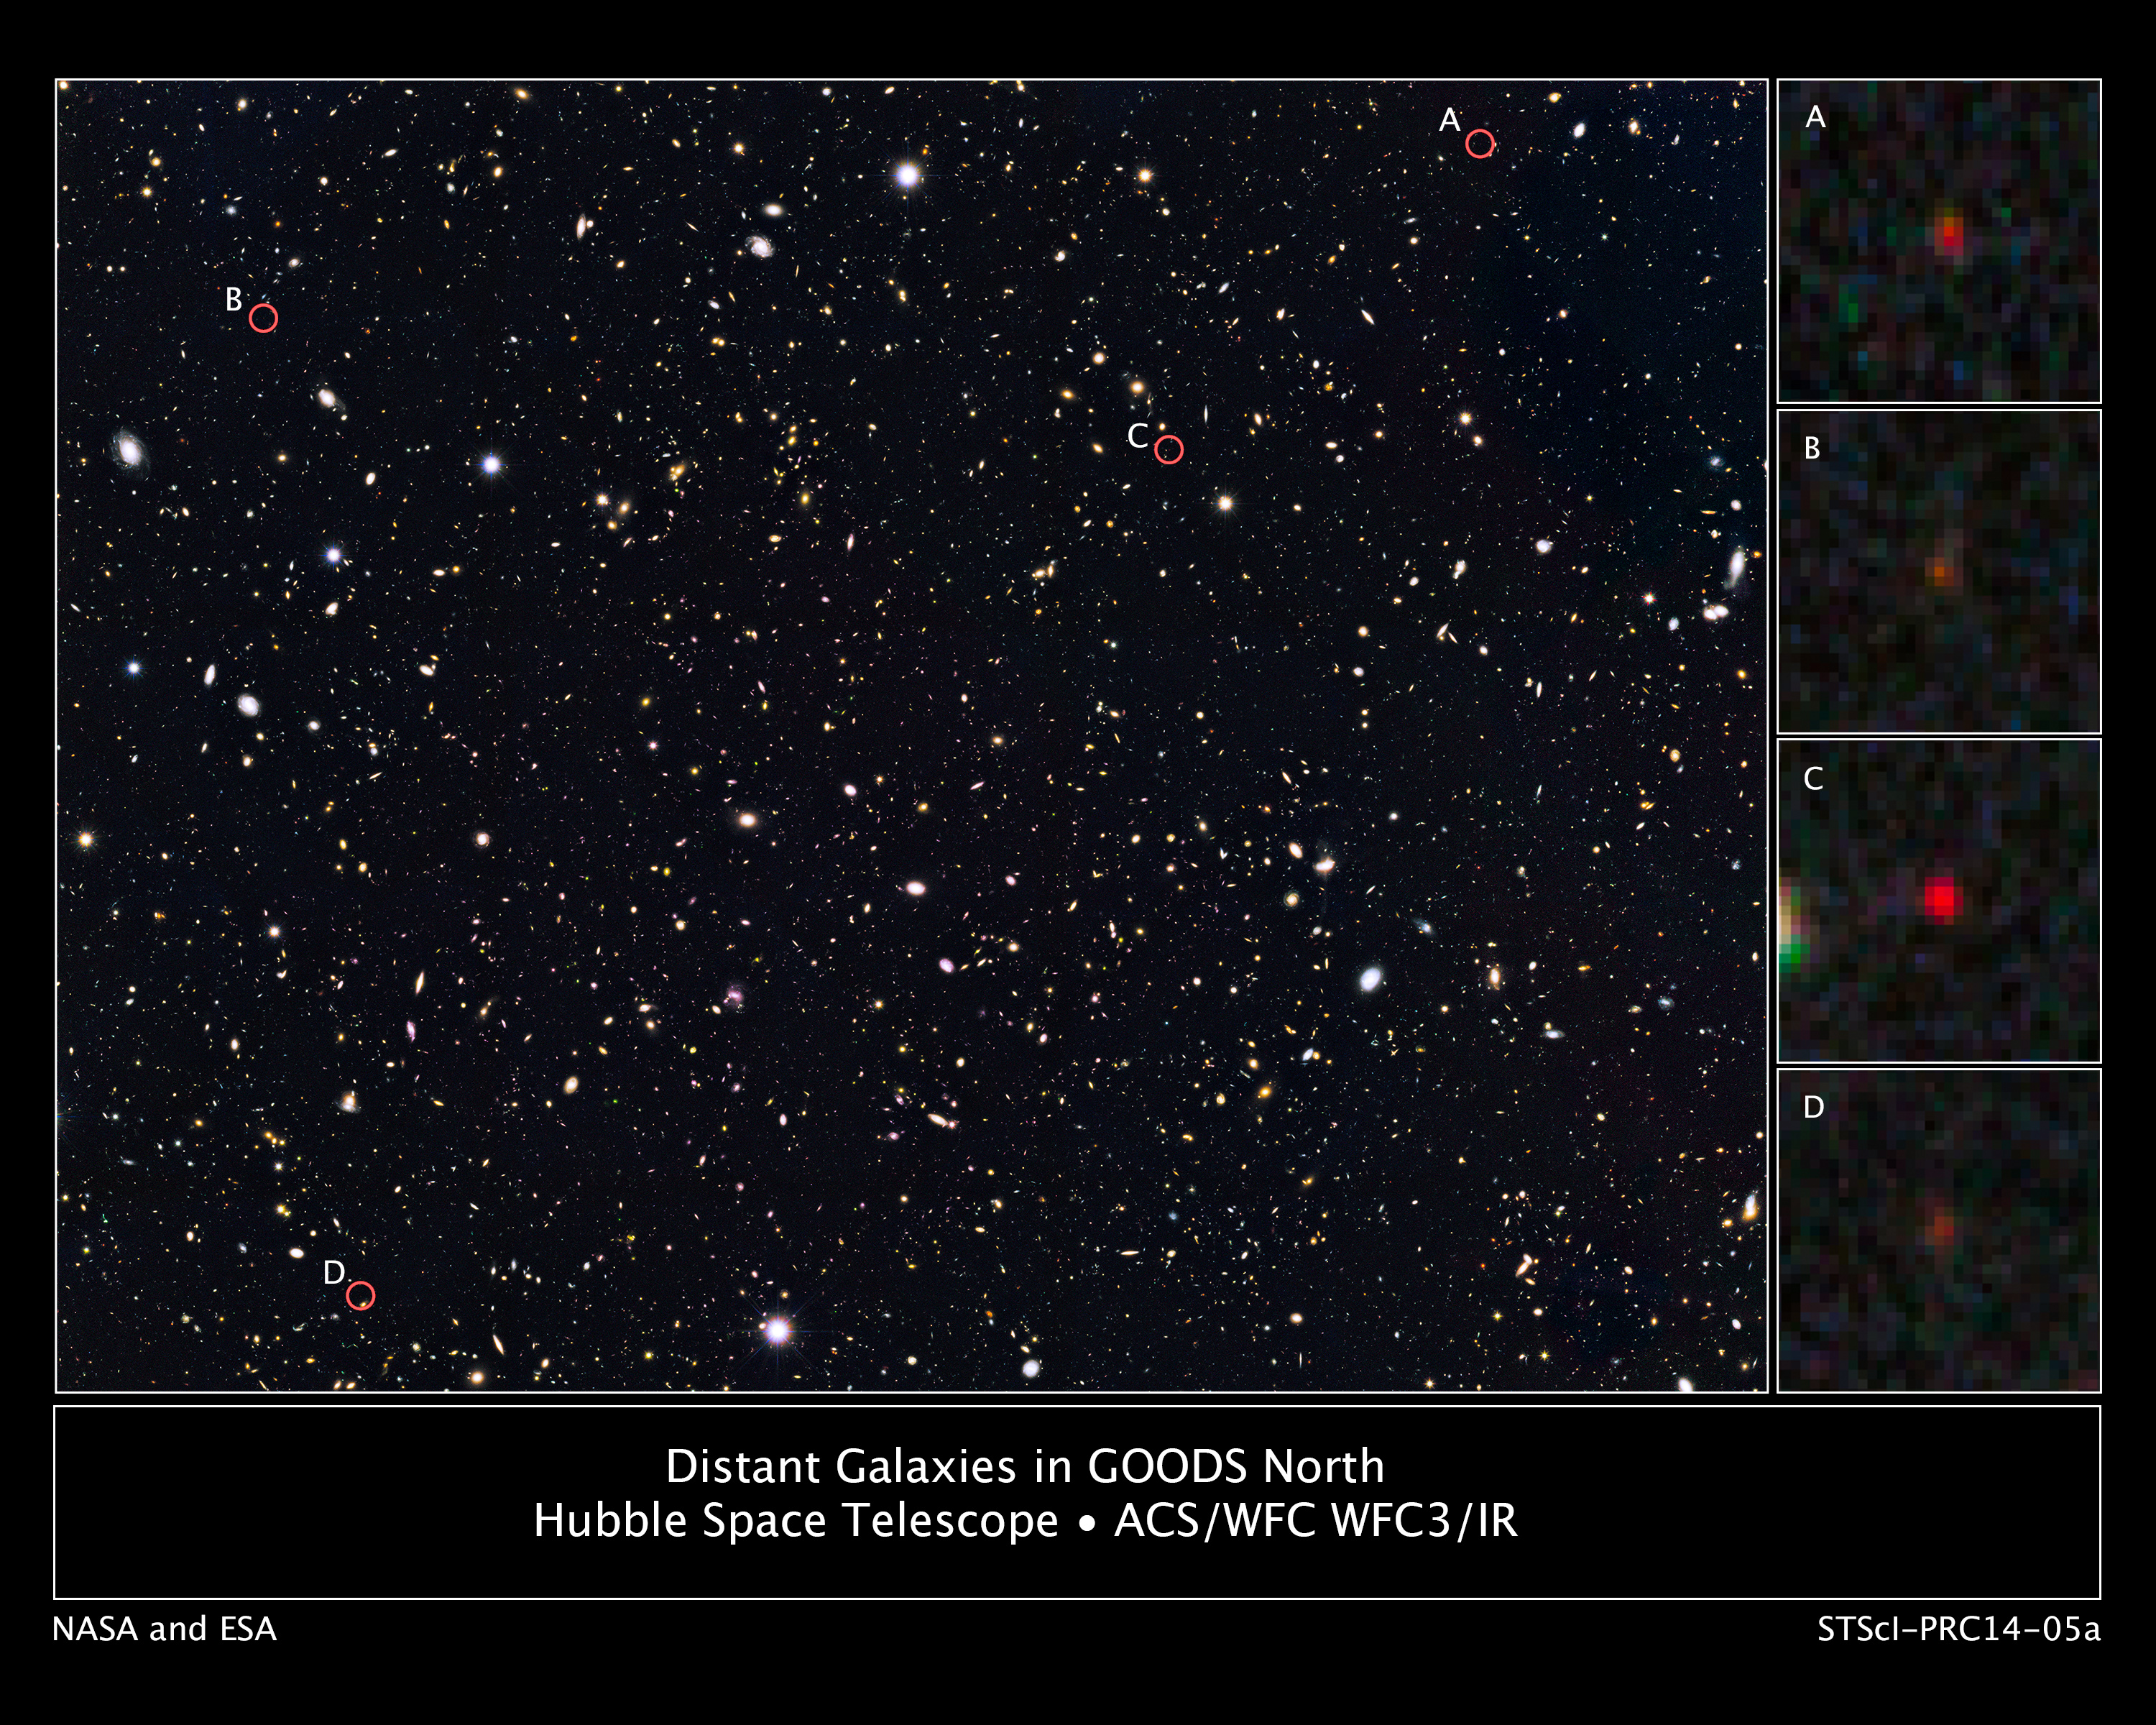

Distant galaxies in the GOODS North survey

This is a portion of a deep sky Hubble Space Telescope survey called GOODS North (Great Observatories Origins Deep Survey). The view is a composite of images taken in visible and near-infrared light. Researchers have circled four unusually red objects that appear as they existed just 500 million years after the Big Bang. They appear red because their light has been stretched to longer infrared wavelengths by the expansion of the Universe. These extremely compact and bright galaxies present a puzzle to researchers because they are much more luminous than anything previously seen at such an early epoch. The young galaxies are bright because they are forming stars at a much faster rate than for other galaxies found at such early times.

Credit: NASA, ESA, G. Illingworth (University of California, Santa Cruz), P. Oesch (University of California, Santa Cruz; Yale University), R. Bouwens and I. Labbé (Leiden University), and the Science Team